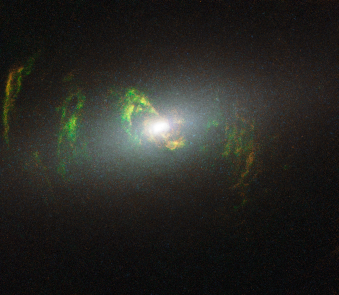

Hubble view of green filament in galaxy NGC 5252

This new NASA/ESA Hubble Space Telescope image shows ghostly green filaments, lying within galaxy NGC 5252. This filament was illuminated by a blast of radiation from a quasar — a very luminous and compact region that surrounds the supermassive black hole at the centre of its host galaxy.

Its bright green hue is a result of ionised oxygen, which glows brightly at green wavelengths.

Credit: NASA, ESA, W. Keel (University of Alabama, USA) and Z. Tsevtanov (Jet Propulsion Laboratory, USA)